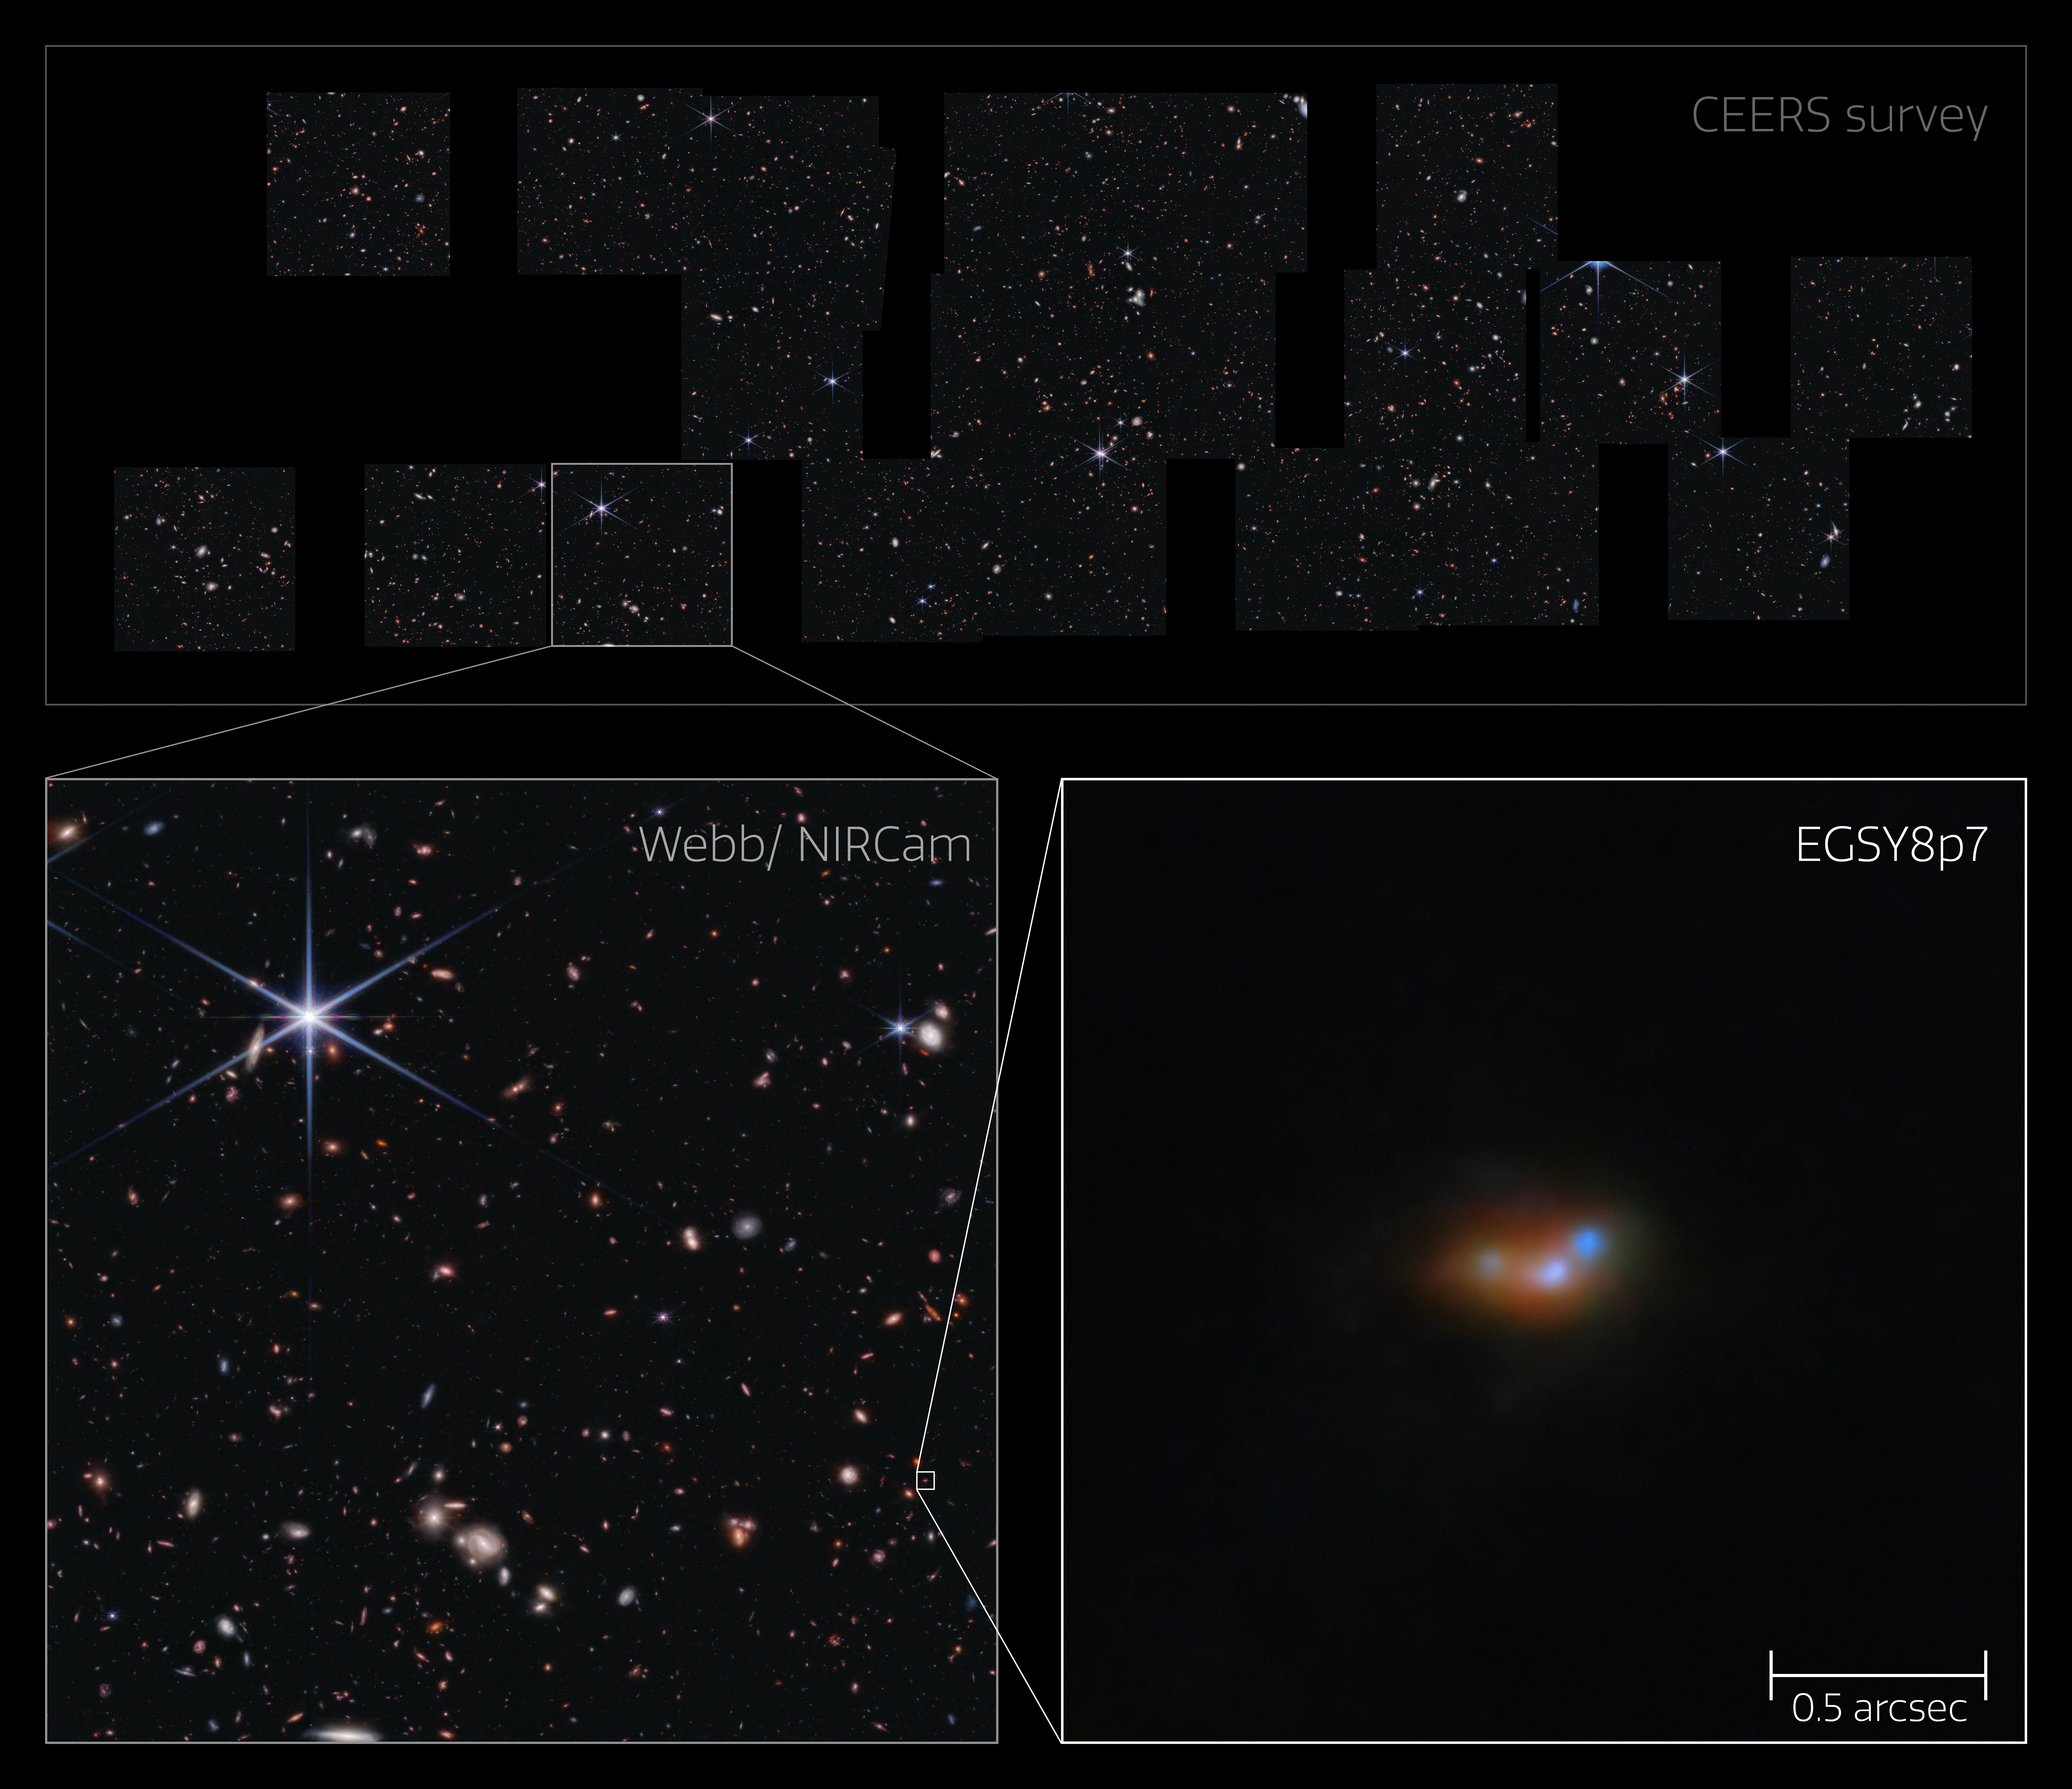

Lyman-α emitting galaxy EGSY8p7 in the CEERS survey field (NIRCam image)

This image shows the galaxy EGSY8p7, a bright galaxy in the early Universe where light emission is seen from, among other things, excited hydrogen atoms — Lyman-α emission. The galaxy was identified in a field of young galaxies studied by Webb in the CEERS survey. In the bottom two panels, Webb’s high sensitivity picks out this distant galaxy along with its two companion galaxies, where previous observations saw only one larger galaxy in its place.

This discovery of a cluster of interacting galaxies sheds light on the mystery of why the hydrogen emission from EGSY8p7, shrouded in neutral gas formed after the Big Bang, should be visible at all. Astronomers have concluded that the intense star-forming activity within these interacting galaxies energised hydrogen emission and cleared swathes of gas from their surroundings, allowing the unexpected hydrogen emission to escape.

This graphic is assembled from multiple images captured by Webb’s NIRCam instrument as part of the CEERS survey. The close-up view of EGSY8p7 was newly processed for this image, making use of NIRCam data captured with seven different near-infrared filters.

Credit: ESA/Webb, NASA & CSA, S. Finkelstein (UT Austin), M. Bagley (UT Austin), R. Larson (UT Austin), A. Pagan (STScI), C. Witten, M. Zamani (ESA/Webb)